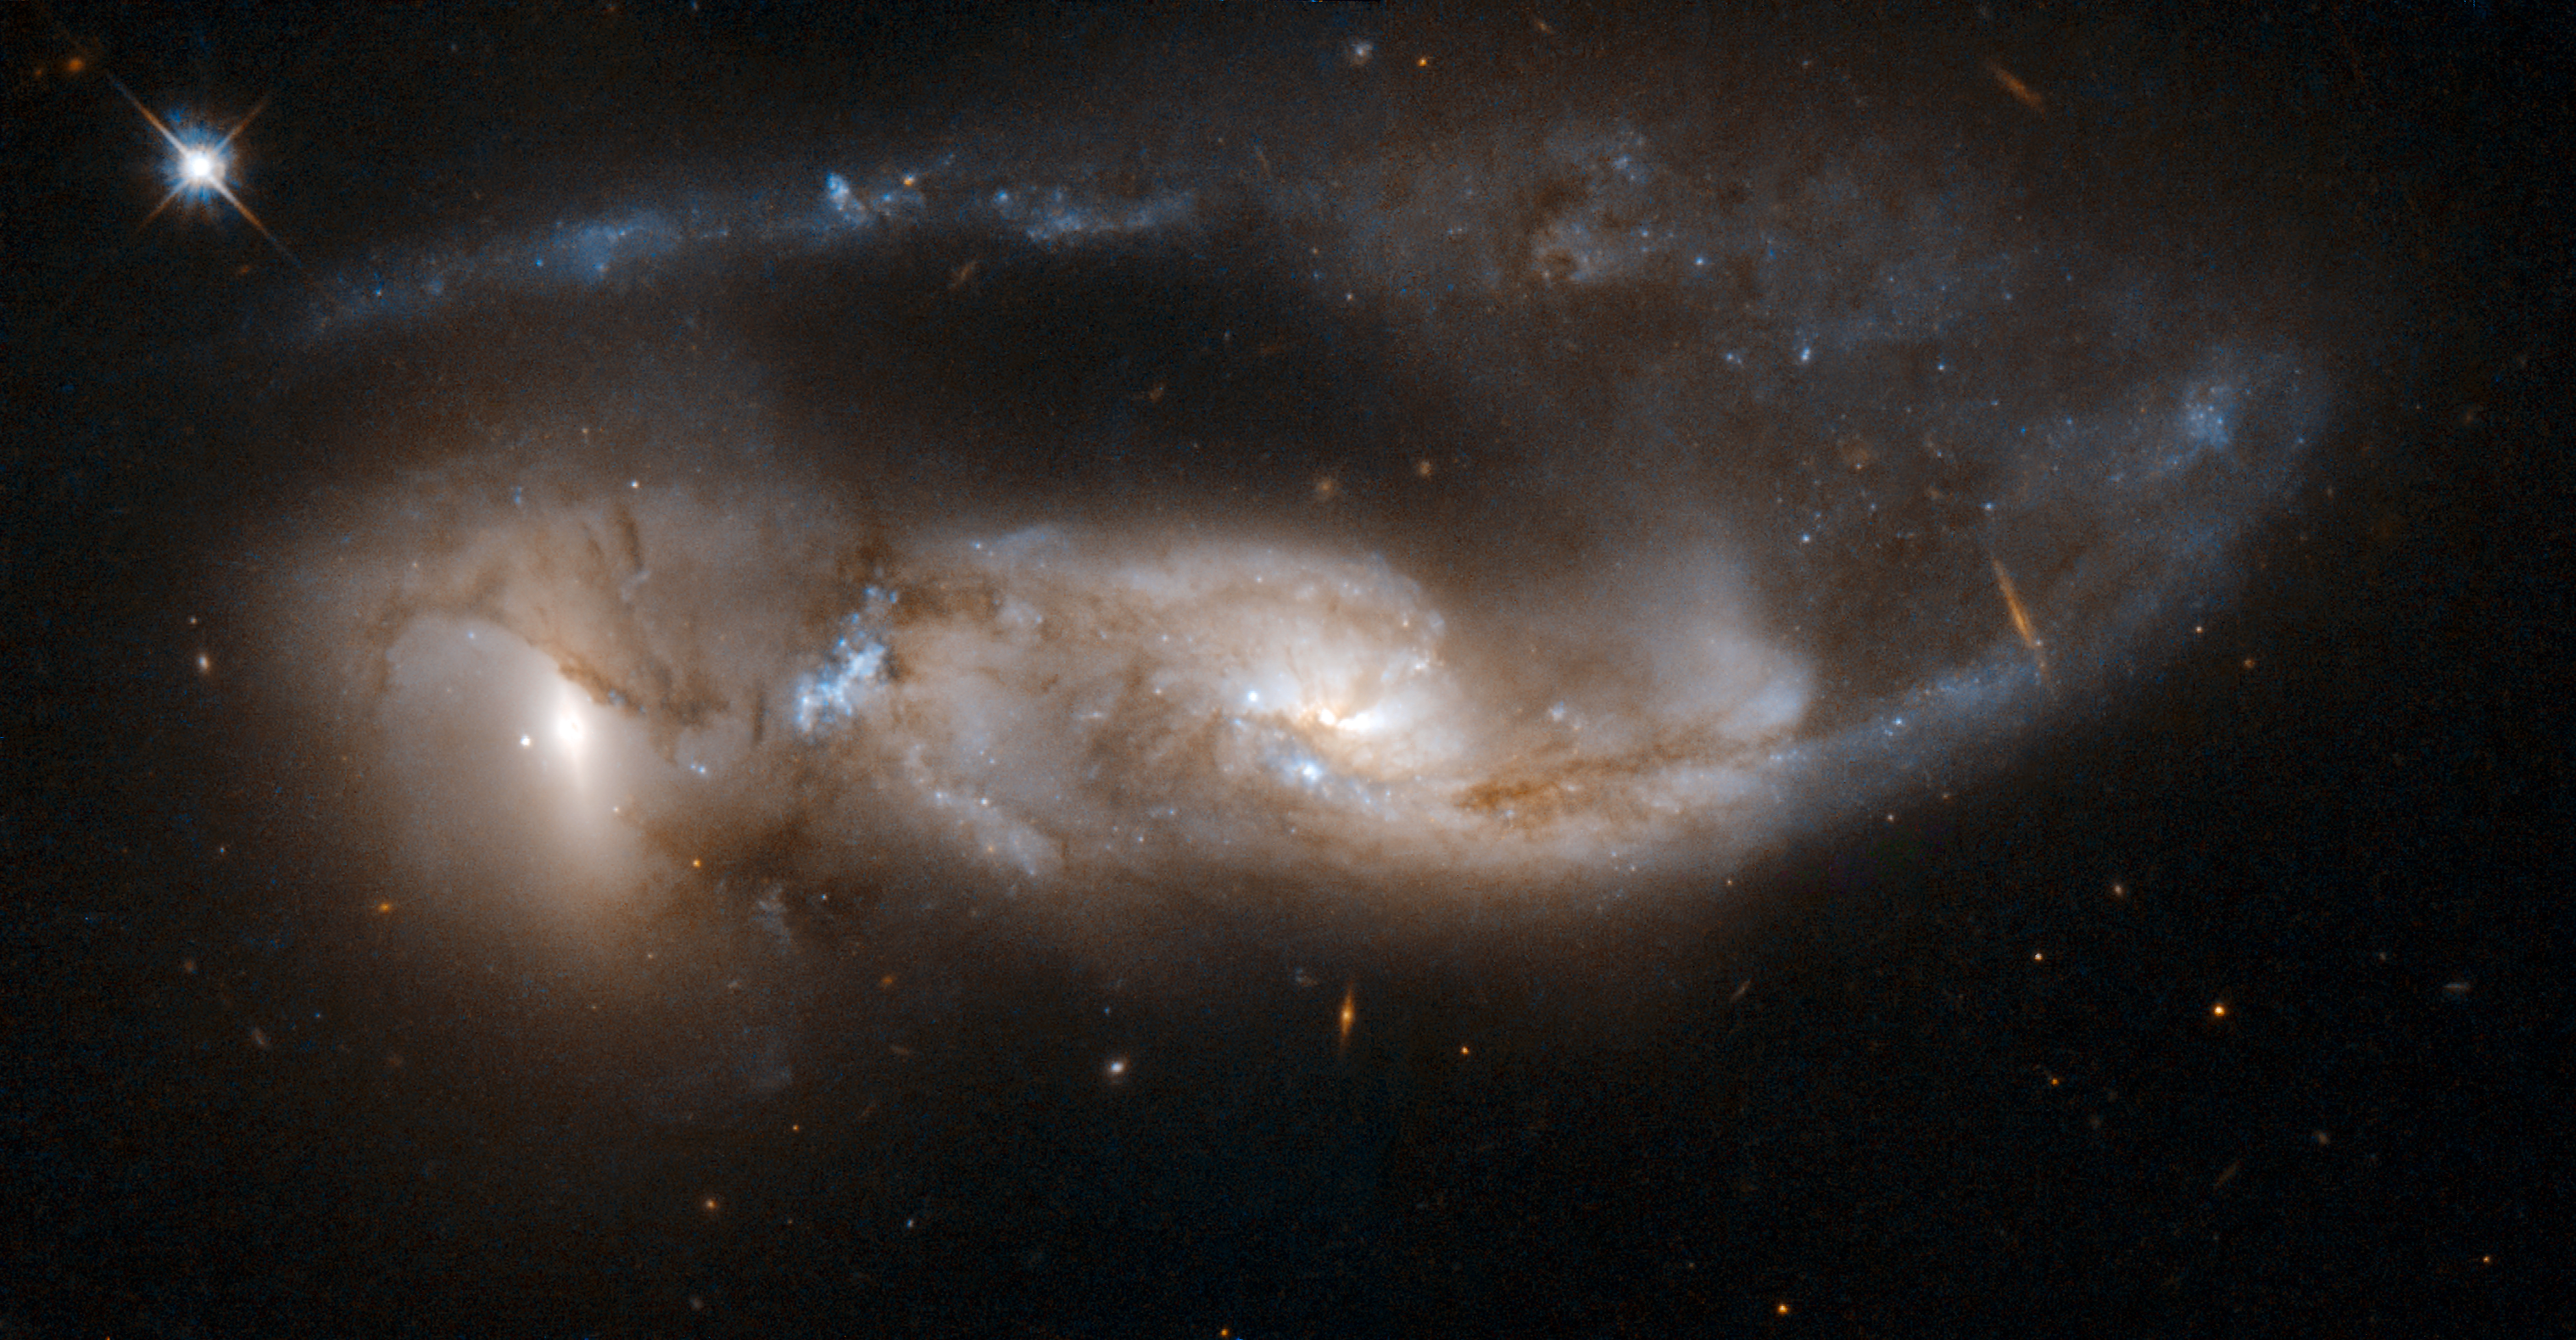

NGC 6621, NGC 6622

Arp 81 is a strongly interacting pair of galaxies, seen about 100 million years after their closest approach. It consists of NGC 6621 (to the right) and NGC 6622 (to the left). NGC 6621 is the larger of the two, and is a very disturbed spiral galaxy. The encounter has pulled a long tail out of NGC 6621 that has now wrapped behind its body. The collision has also triggered extensive star formation between the two galaxies. Scientists believe that Arp 81 has a richer collection of young massive star clusters than the notable Antennae galaxies (which are much closer than Arp 81). The pair is located in the constellation of Draco, approximately 300 million light-years away from Earth. Arp 81 is the 81st galaxy in Arp's Atlas of Peculiar Galaxies.

This image is part of a large collection of 59 images of merging galaxies taken by the Hubble Space Telescope and released on the occasion of its 18th anniversary on 24th April 2008.

Credit: NASA, ESA, the Hubble Heritage Team (STScI/AURA)-ESA/Hubble Collaboration and W. Keel (University of Alabama, Tuscaloosa)